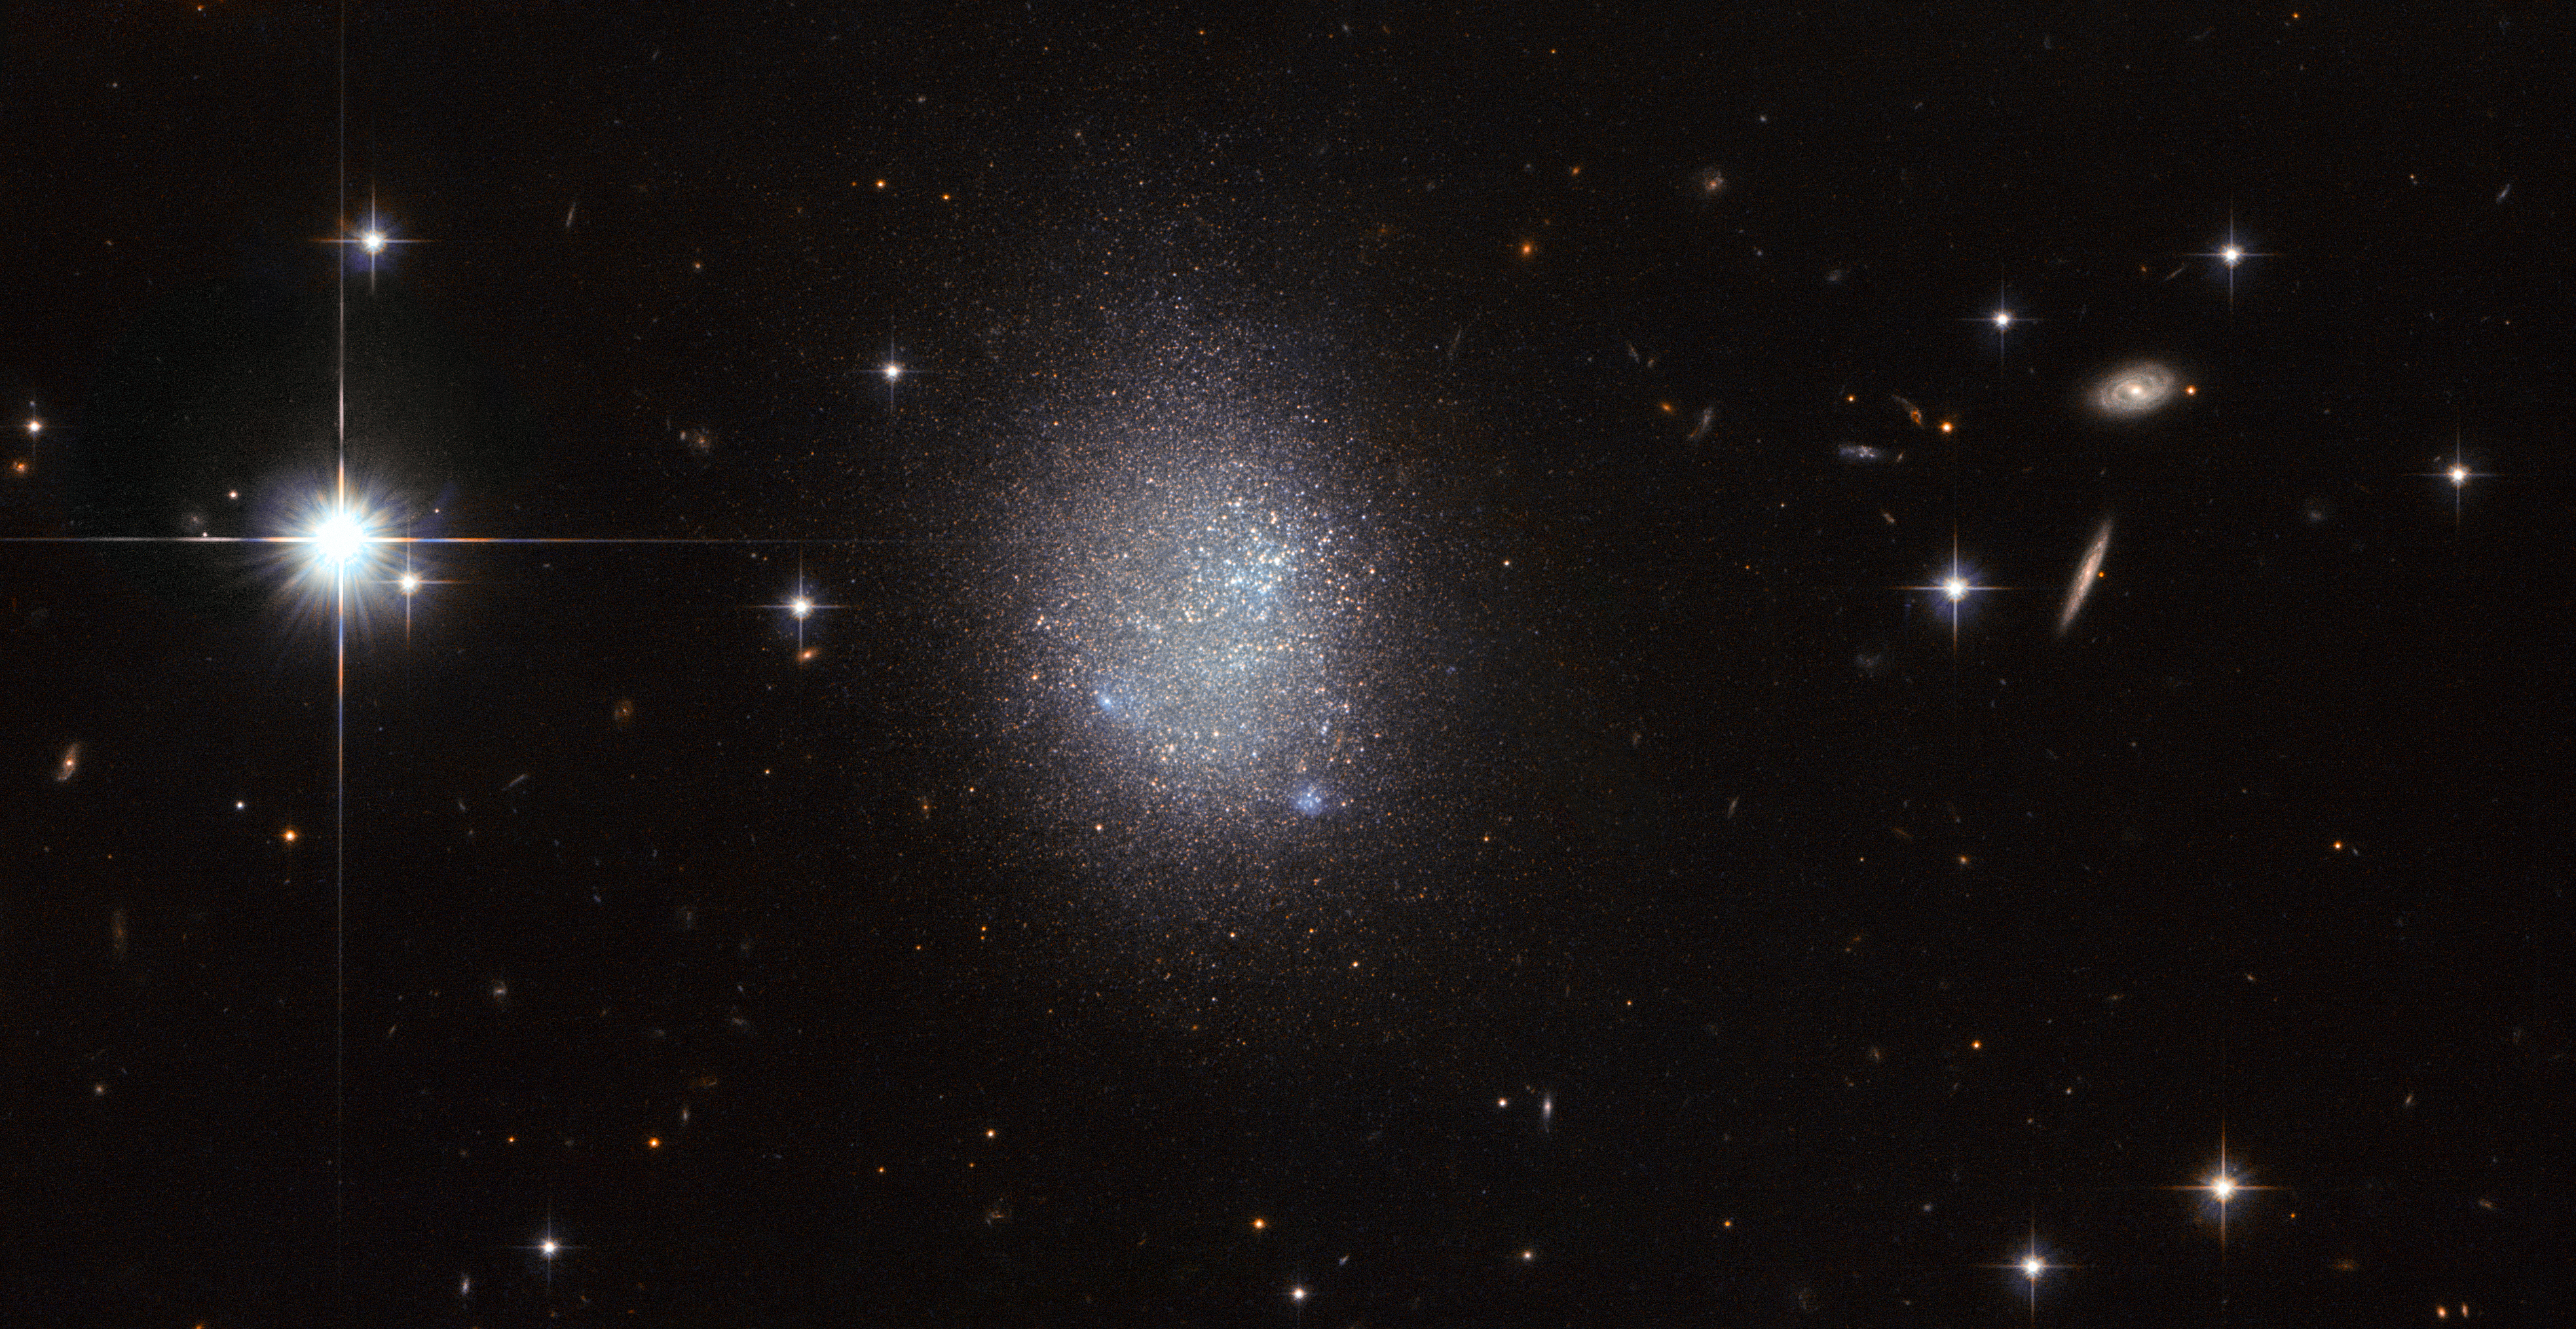

True blue

This NASA/ESA Hubble Space Telescope image shows a galaxy known as UGC 11411. It is a galaxy type known as an irregular blue compact dwarf (BCD) galaxy.

BCD galaxies are about a tenth of the size of a typical spiral galaxy such as the Milky Way, and are made up of large clusters of hot, massive stars that ionise the surrounding gas with their intense radiation. Because these stars are so hot they glow brightly with a blue hue, giving galaxies like UGC 11411 their characteristic blue tint. With these massive stars being less than 10 million years old, they are very young compared to stellar standards. They were created during a starburst, a galaxy-wide episode of furious star formation. UGC 11411 in particular has an extremely high star formation rate, even for a BCD galaxy.

Unusually for galaxies with such intense star-forming regions, BCDs don’t contain either a lot of dust, or the heavy elements that are typically found as trace elements in recently formed stars, making their composition very similar to that of the material from which the first stars formed in the early Universe. Because of this astronomers consider BCD galaxies to be good objects to study to improve our understanding of primordial star-forming processes.

The bright stars in the image are foreground stars in our own Milky Way galaxy.

Credit: ESA/Hubble & NASA